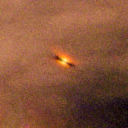

473-245

One of 42 new proplyds discovered in the Orion Nebula, 473-245 is one of the dark proplyds that lies relatively far from the nebula’s brightest star, Theta 1 Orionis C.

Credit: NASA/ESA and L. Ricci (ESO)